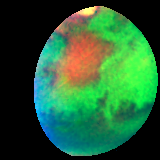

Martian colours Provide Clues About Martian Water (Hubble NICMOS View)

A false-color picture taken in infrared light reveals features that cannot be seen in visible light. Hubble's unique infrared view pinpoints variations in the abundance and distribution of unknown water-bearing minerals on the planet.

Credit: Jim Bell (Cornell University), Justin Maki (JPL), and Mike Wolff (Space Sciences Institute) and NASA/ESA